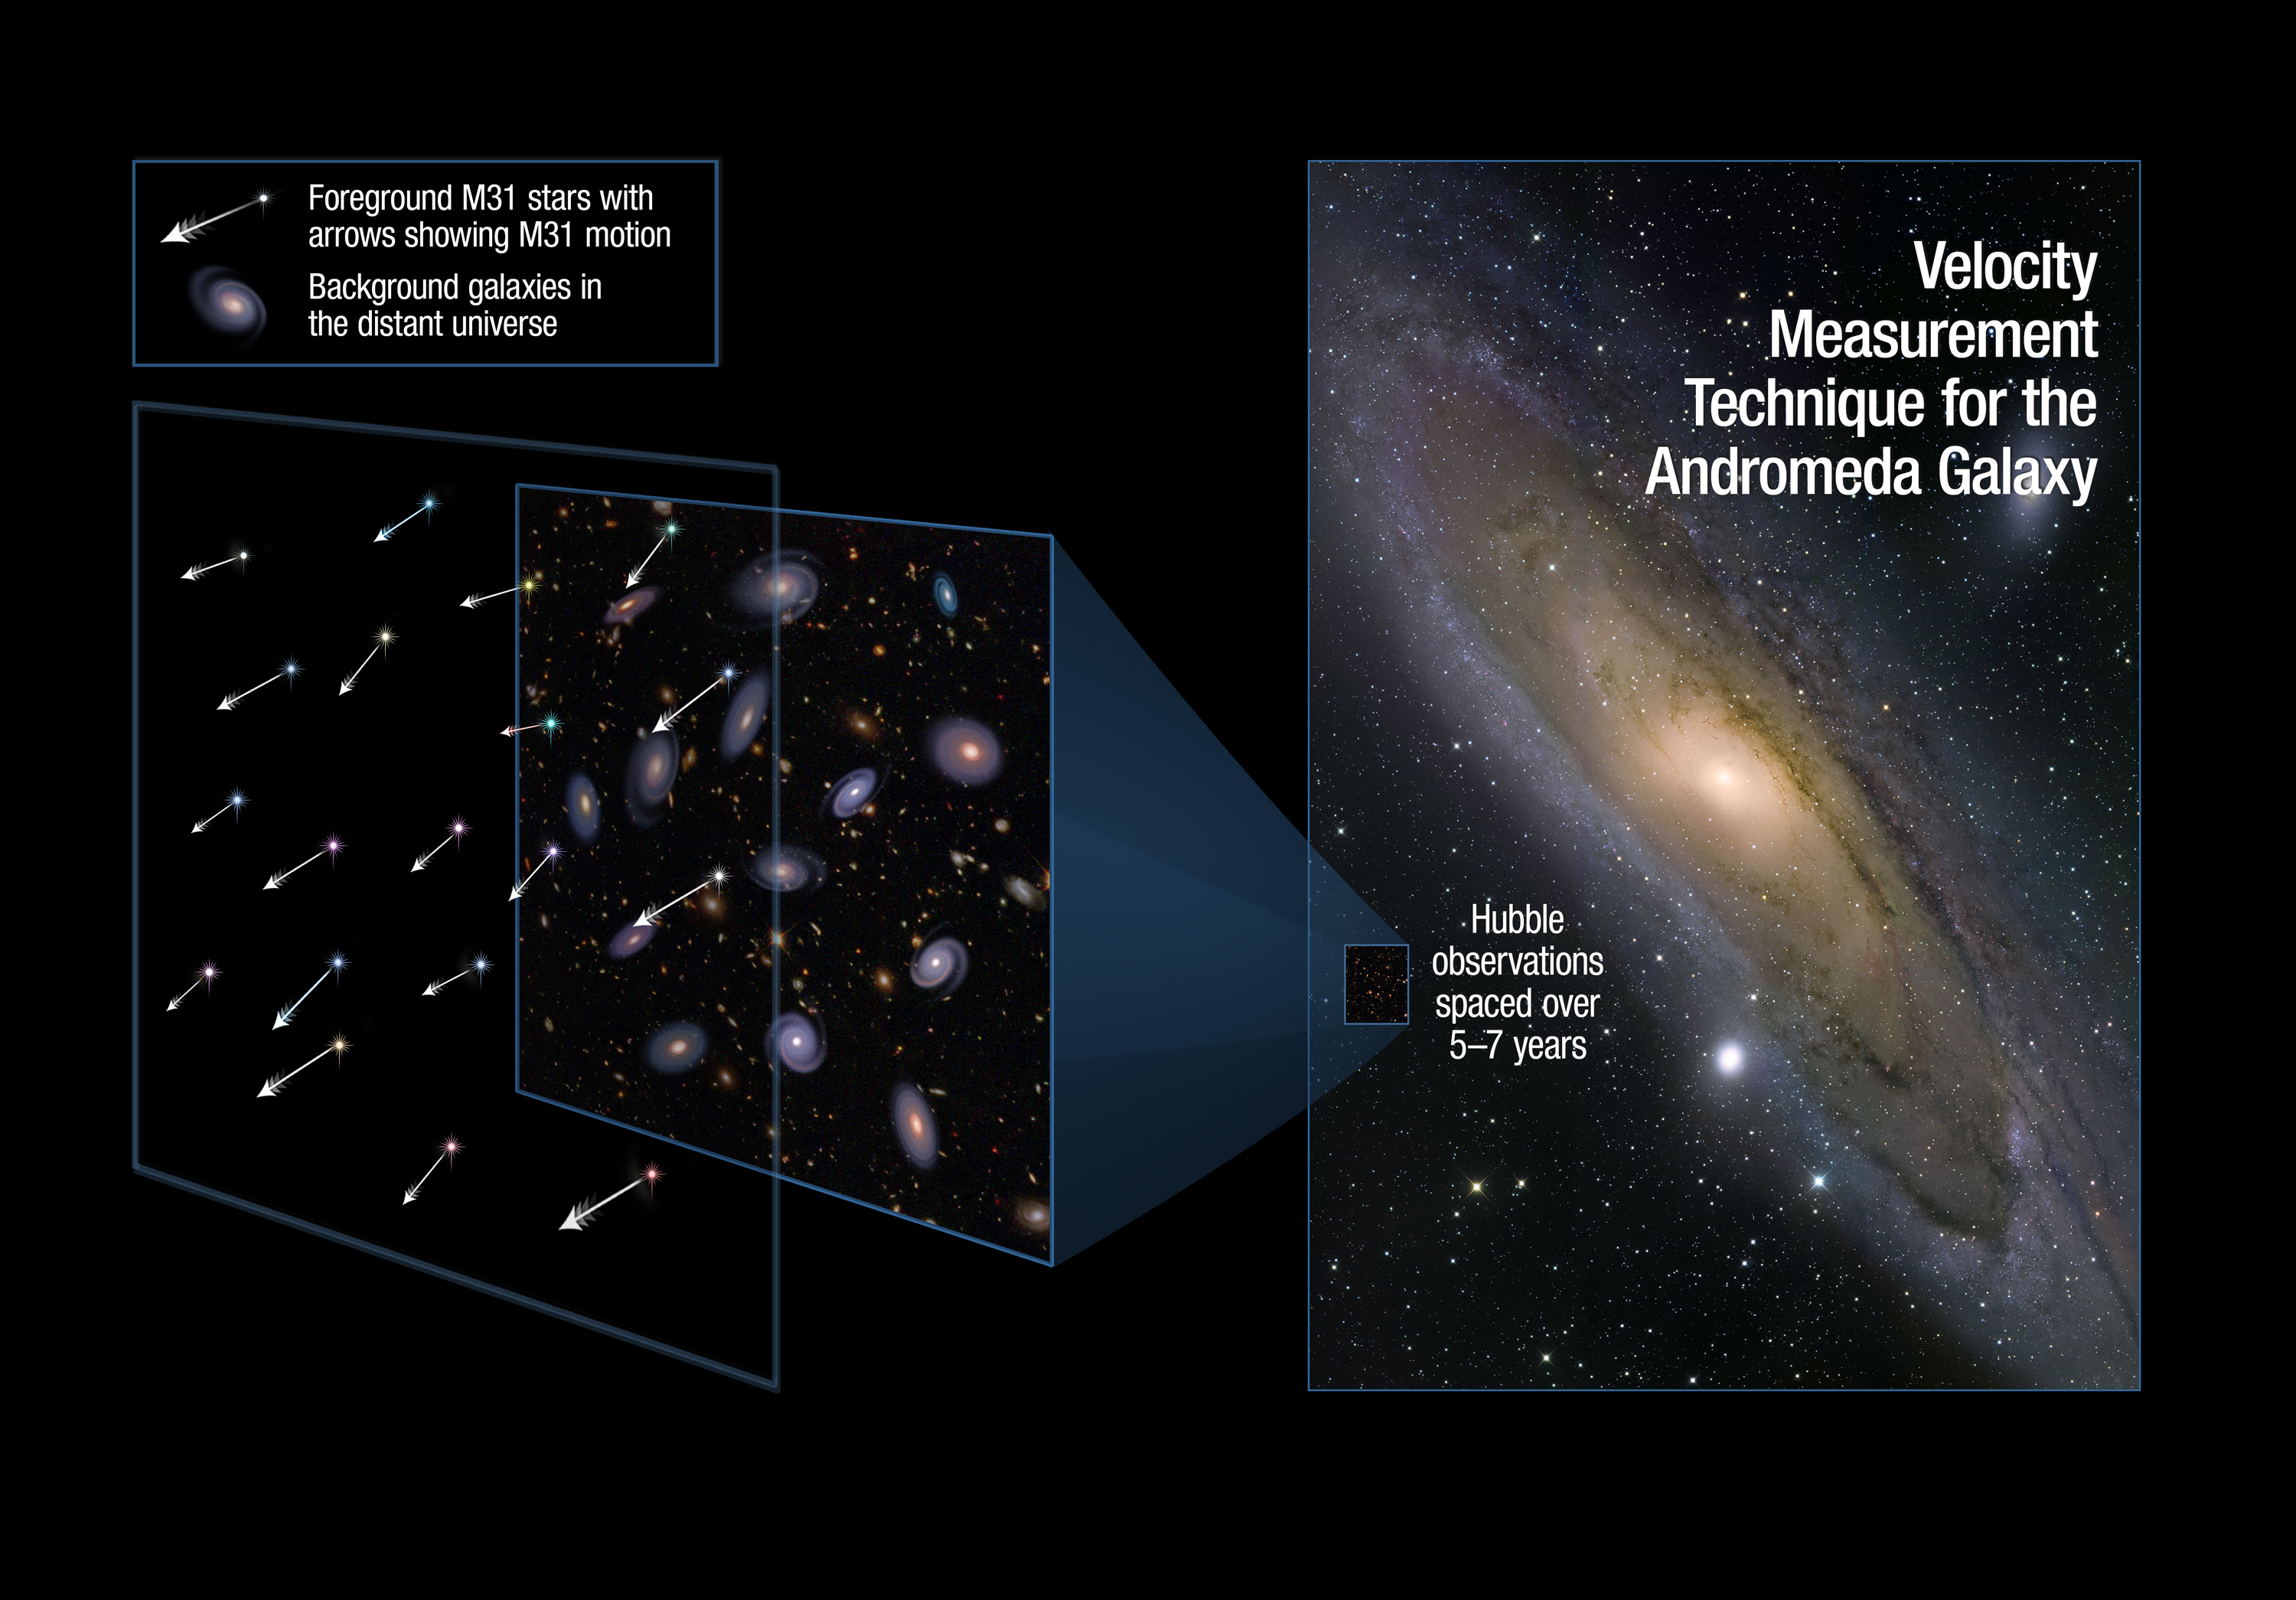

Measuring the Drift of the Andromeda Galaxy

This illustration shows one of the regions in the neighbouring Andromeda galaxy where astronomers aimed the Hubble Space Telescope to make precise measurements of the galaxy's lateral motion. As the galaxy drifts through space, the stars will appear to uniformly move against the far-more-distant background galaxies, which remain fixed on the sky.

Credit: NASA, ESA, and A. Feild and R. van der Marel (STScI)